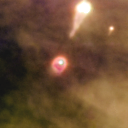

171-340

One of 42 new proplyds discovered in the Orion Nebula, 171-340 is one of the bright proplyds that lies relatively close to the nebula’s brightest star, Theta 1 Orionis C.

Credit: NASA/ESA and L. Ricci (ESO)